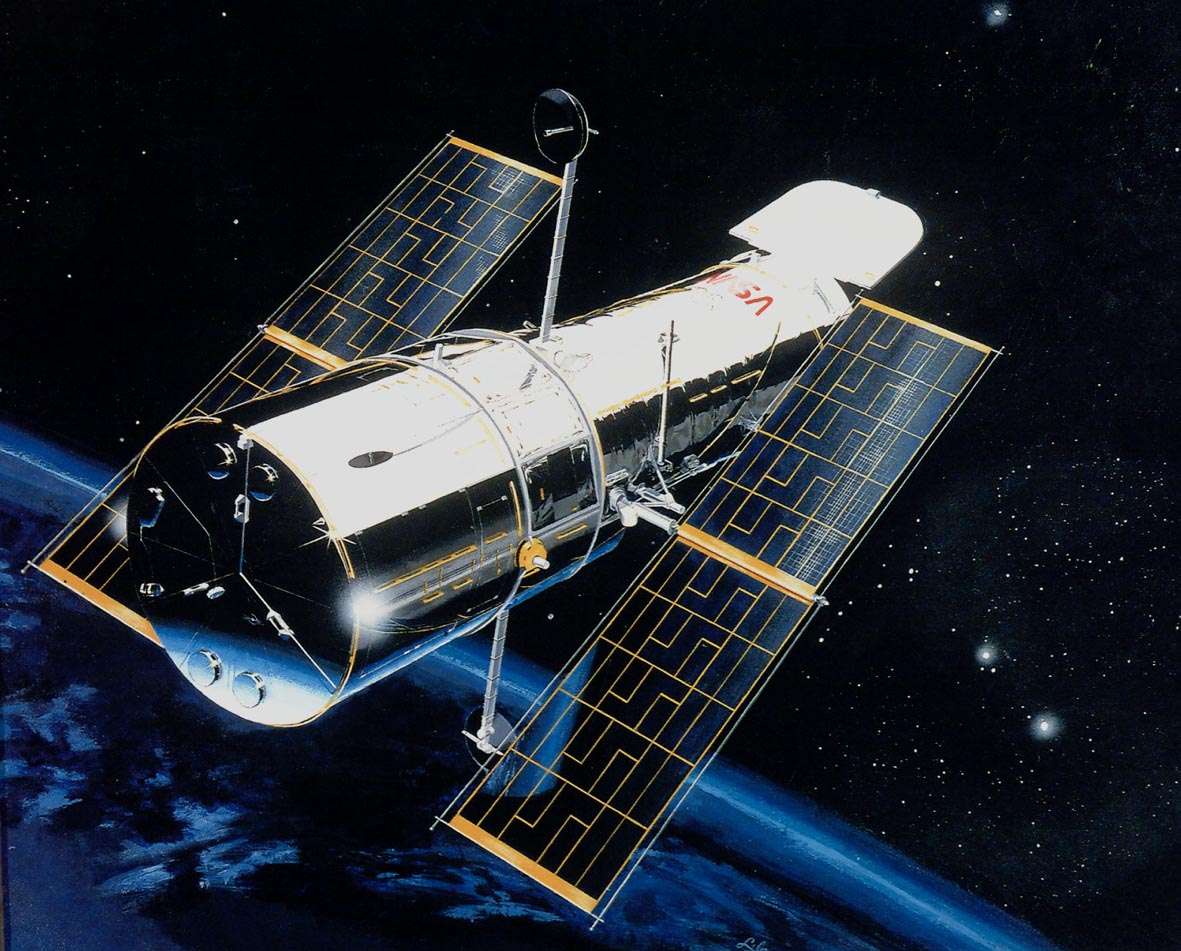

Artist rendition of Hubble

This is an artist's rendition of the Hubble Space Telescope (HST).

Credit: NASA/ESA